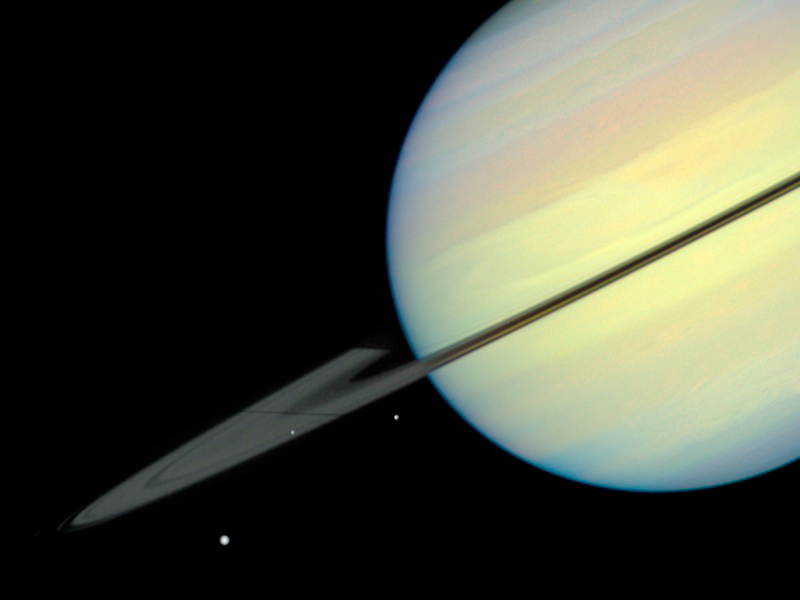

Saturn's Moons - Frame 2

This movie still captures the moons Mimas, Enceladus, and Dione as they begin their race across Saturn's disk. The still is from a movie created from images taken by NASA/ESA Hubble Space Telescope. It reveals the planet's rings tilted nearly edge-on toward the Sun, an event that occurs once every 15 years. Because of this special alignment, the moons cast shadows on the planet and its rings. Dione is on the far left of the image, Mimas is in the middle, and Enceladus is on the right. Dione and Enceladus are casting long shadows on the rings.

Credit: NASA/ESA and E. Karkoschka (University of Arizona)